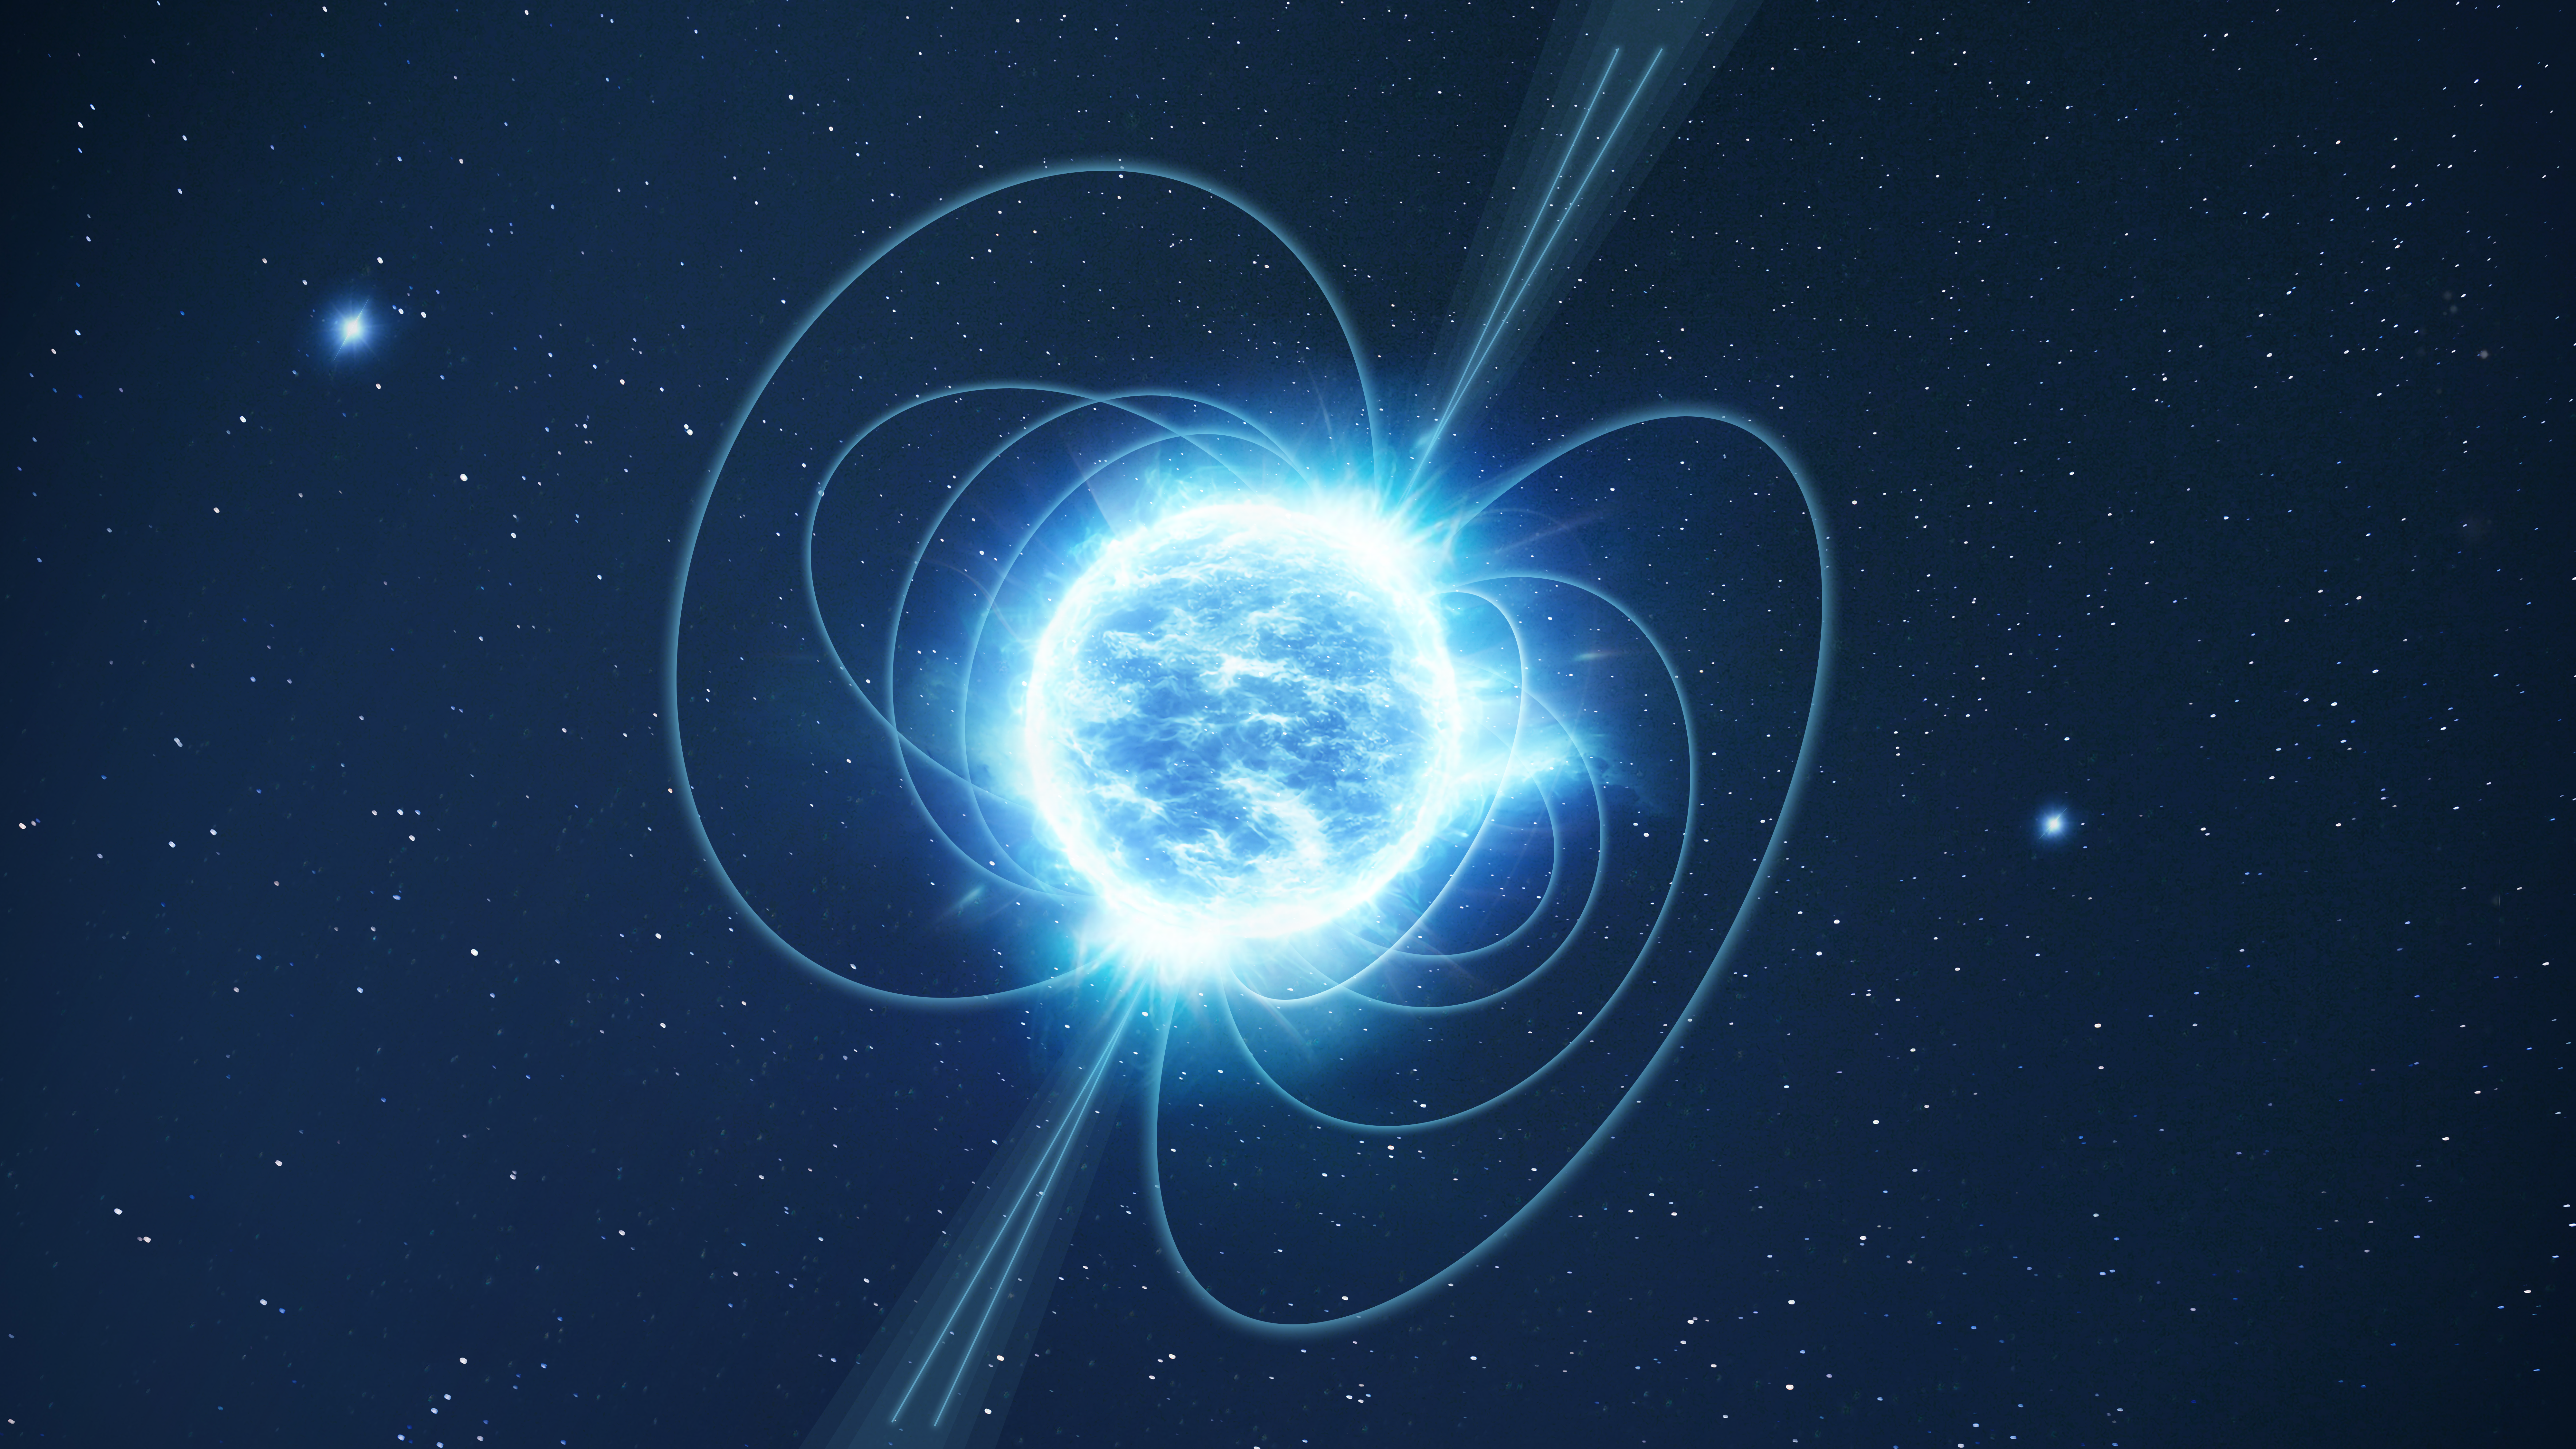

Magnetar (artist’s impression)

This is an artist’s impression of a magnetar, which is a special type of neutron star. Neutron stars are some of the most extreme objects in the Universe. These stars typically pack more than the mass of the Sun into a sphere of neutrons about 20 kilometres across. Unsurprisingly, these exotic objects can display several extreme behaviours, such as X-ray and gamma-ray outbursts, intense magnetic fields and rapid rotation. Magnetars are a specific type of neutron star that are distinguished by their exceptionally strong magnetic fields (which are significantly stronger than those of typical neutron stars).

Researchers using the NASA/ESA Hubble Space Telescope have discovered that the magnetar SGR 0501+4516 was not born in a neighbouring supernova as previously thought. The birthplace of this object is now unknown, and SGR 0501+4516 is the likeliest candidate in our galaxy for a magnetar that was not born in a supernova. It is one of only about 30 known magnetars in the Milky Way.

Credit: ESA